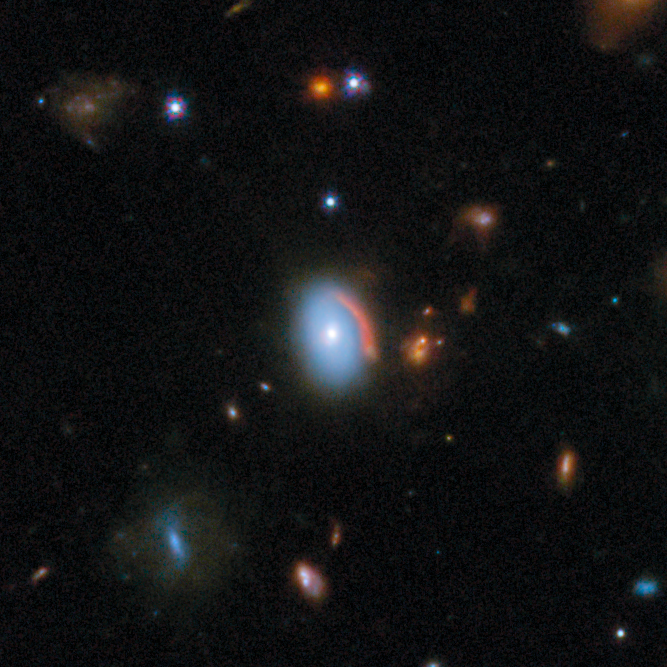

Gravitational lens COSJ100024+021749

The light from the luminous blue foreground galaxy traveled for about 4 billion years to reach us, while the background galaxy’s light has been on a much longer journey, taking more than 11 billion years to reach us. This newly detected lens will help researchers understand galaxy evolution and the formation of stars in dusty environments.

This gravitational lens is one of eight featured in the September 2025 Picture of the Month.

Credit: ESA/Webb, NASA & CSA, G. Gozaliasl, A. Koekemoer, M. Franco